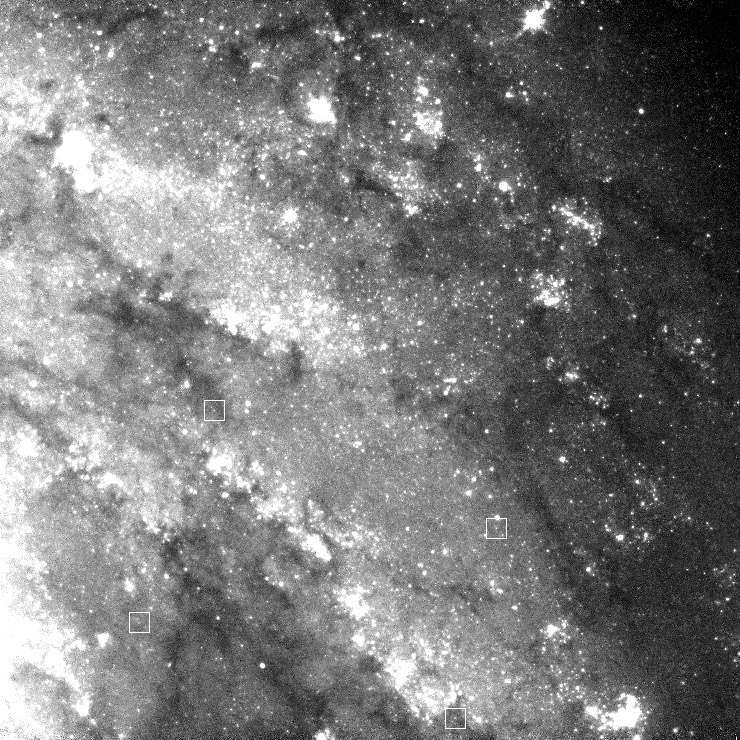

PC only with location of Cepheids marked

Hubble observed the spiral galaxy NGC 4603, located about 120 million light years away from Earth in the constellation Centaurus. The goal of this observation was to study Cepheid variable stars, of which about 40 were found in the galaxy. The positions of four Cepheid stars are marked on the picture.

Cepheids are 4-20 times more massive than the Sun and 100 000 times more luminous. As their luminosity and pulsation period are connected to each other they are used as to measure the distance of galaxies. Due to their immense luminosity this is possisble out to large distances.

Credit: NASA & ESA